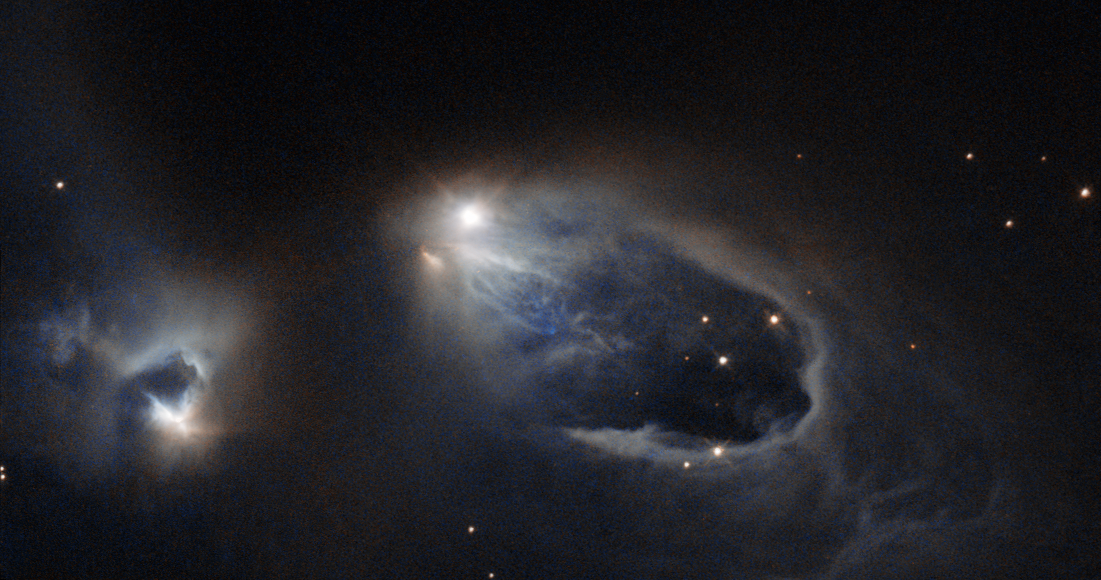

A stellar sneezing fit

Look at the bright star in the middle of this image. Achoo! It has just sneezed. This sight will only last for a few thousand years — a blink of an eye in the young star's life.

If you could carry on watching for a few years you would realise it's not just one sneeze, but a sneezing fit. This young star is firing off salvos of super-hot, super-fast gas — Achoo! Achoo! — before it finally exhausts itself. These bursts of gas have shaped the turbulent surroundings, creating structures known as Herbig-Haro objects.

These objects are formed from the star's energetic "sneezes". These salvos can contain as much mass as our home planet, and cannon into nearby clouds of gas at hundreds of kilometres per second. Shock waves form, such as the U-shape below this star. Unlike most other astronomical phenomena, as the waves crash outwards, they can be seen moving across human timescales. Soon, this star will stop sneezing, and grow up to be a star like the Sun.

This region is actually home to several interesting objects. The star at the centre of the frame is a variable star named V633 Cassiopeiae, with Herbig-Haro objects HH 161 and HH 164 forming parts of the horseshoe-shaped loop emanating from it. The slightly shrouded star just to the left is known as V376 Cassiopeiae, another variable star that has succumbed to its neighbour's infectious sneezing fits; this star is also sneezing, creating yet another Herbig-Haro object — HH 162. Both stars are very young and are still surrounded by dusty material left over from their formation, which spans the gap between the two

A version of this image was entered into the Hubble's Hidden Treasures image processing competition by contestant Gilles Chapdelaine.

For more information about these objects, see Hubblecast 49: Supersonic jets from newborn stars.

Credit: ESA/Hubble & NASA Acknowledgement: Gilles Chapdelaine